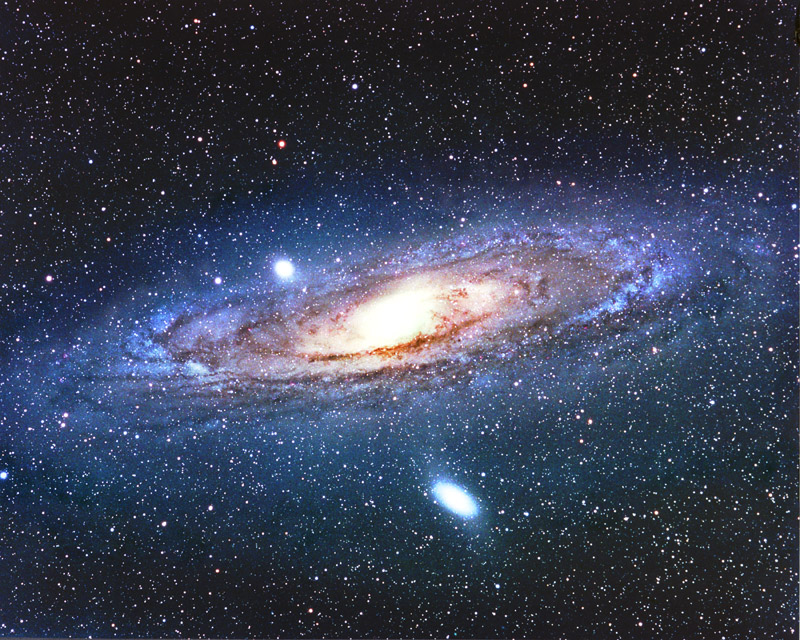

M 31

The Andromeda galaxy, also known as M 31 or Messier 31, is probably the best known galaxy on the sky. Due to its distance to Earth it is also one of the best studied ones. Located in the Andromeda constellation it is the nearest spiral galaxy to the Milky Way. However, it is not the nearest galaxy overall.

The galaxy, which recived its old name from the mythological princess Andromeda, can be seen on a dark night sky with the naked eye. It is the largest galaxy in the Local Group, which also contains the Milky Way, the Triangulum Galaxy and more than 50 smaller galaxies.

Credit: Tony and Daphne Hallas